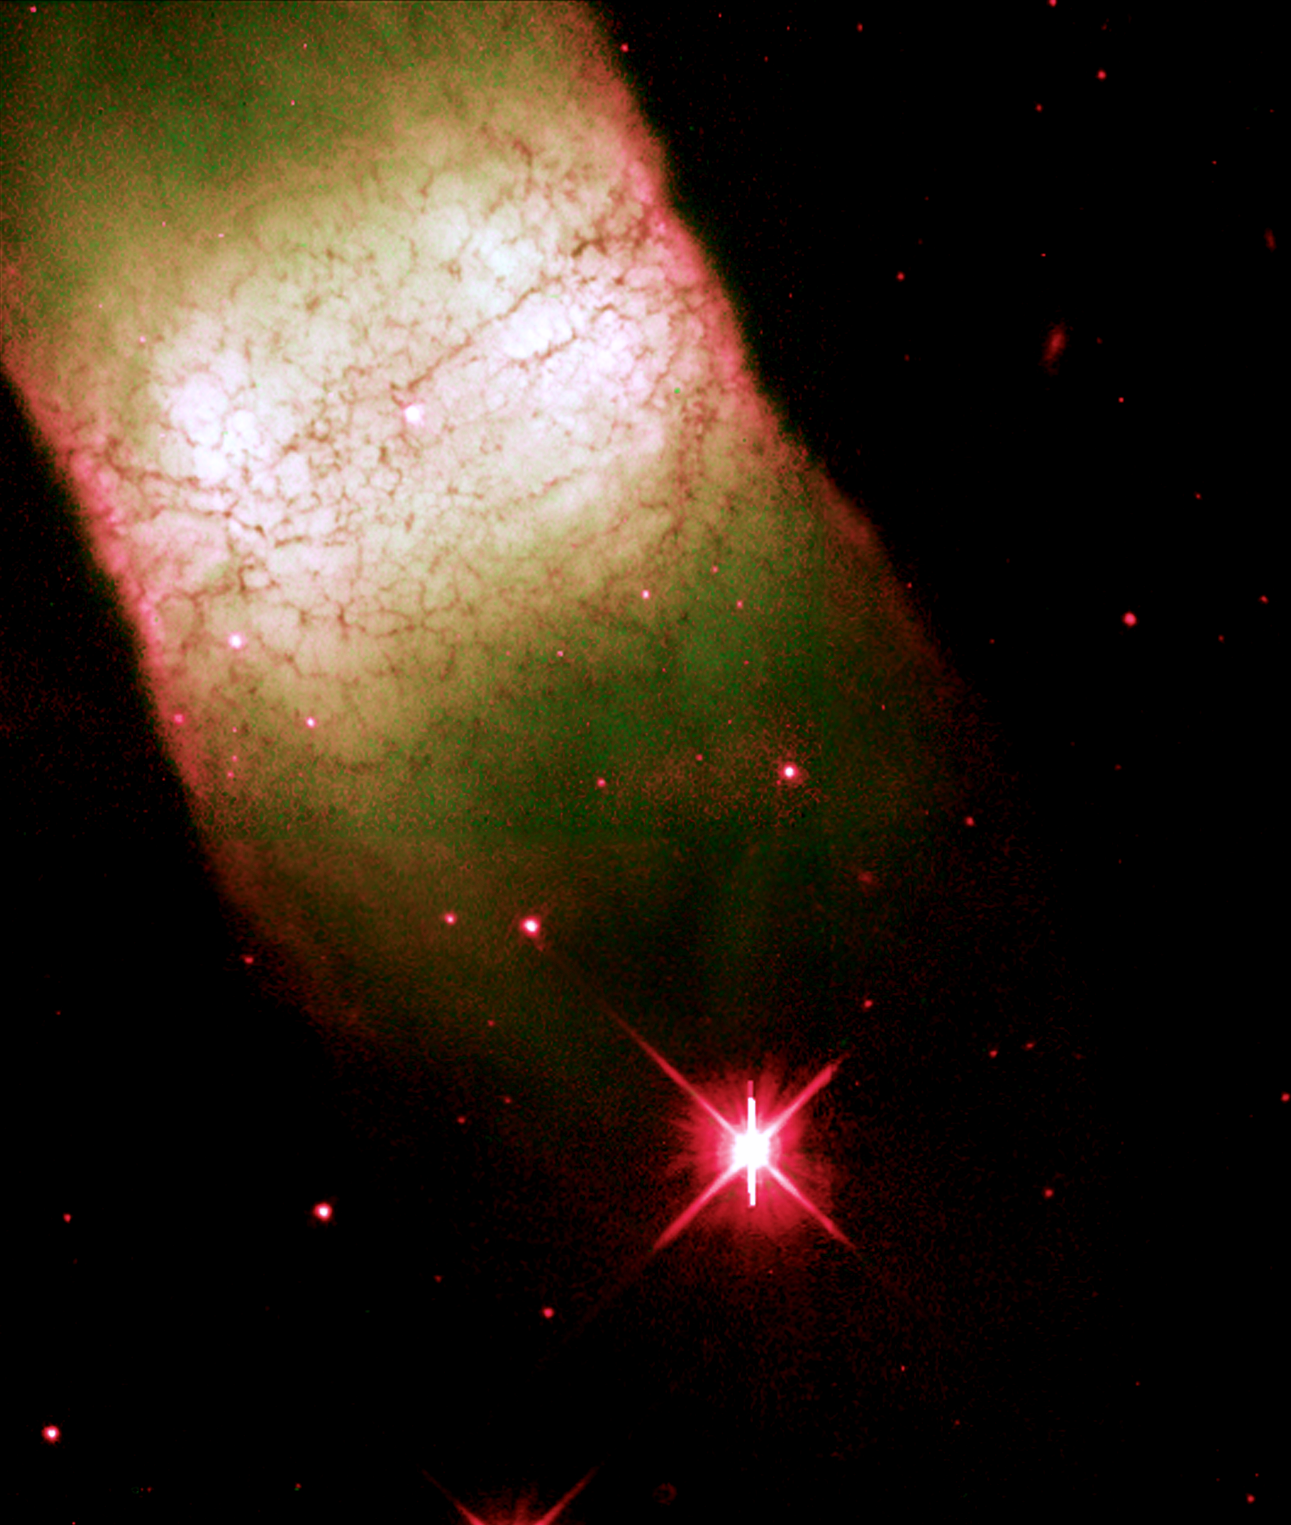

IC 4406

This image is a part of the Hubble Gallery of Planetary Nebulae.

Credit: Howard Bond (ST ScI) and NASA/ESA